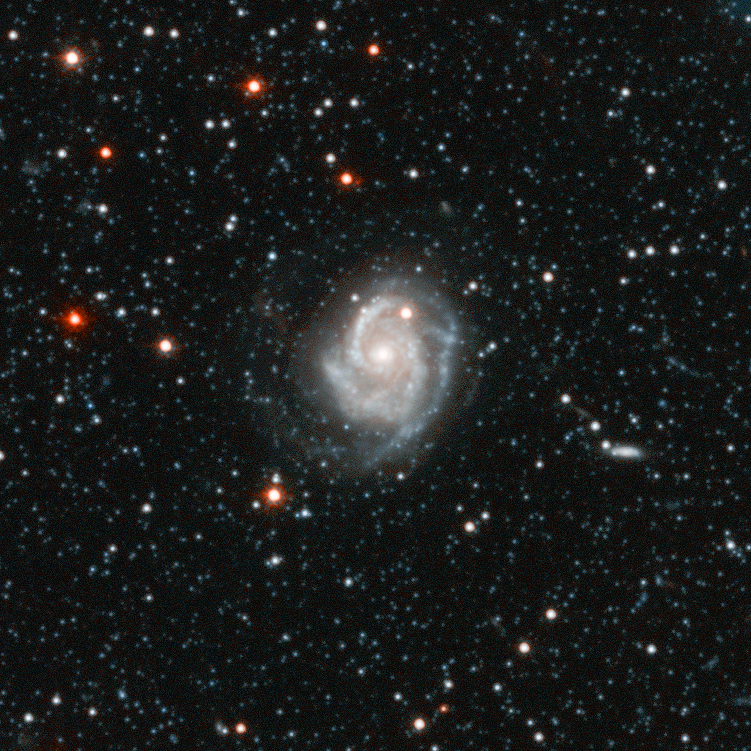

Andromeda Galaxy Halo Details - 4

Relying on the deepest visible-light images ever taken in space, astronomers using NASA's Hubble Space Telescope (HST) have reliably measured the age of the spherical halo of stars surrounding the neighboring Andromeda galaxy (M31). To their surprise, they have discovered that approximately one-third of the stars in Andromeda's halo formed only 6 to 8 billion years ago. That's a far cry from the 11-to-13 billion-year age of the stars in the Milky Way's halo.

Credit: NASA, ESA and T.M. Brown (STScI)